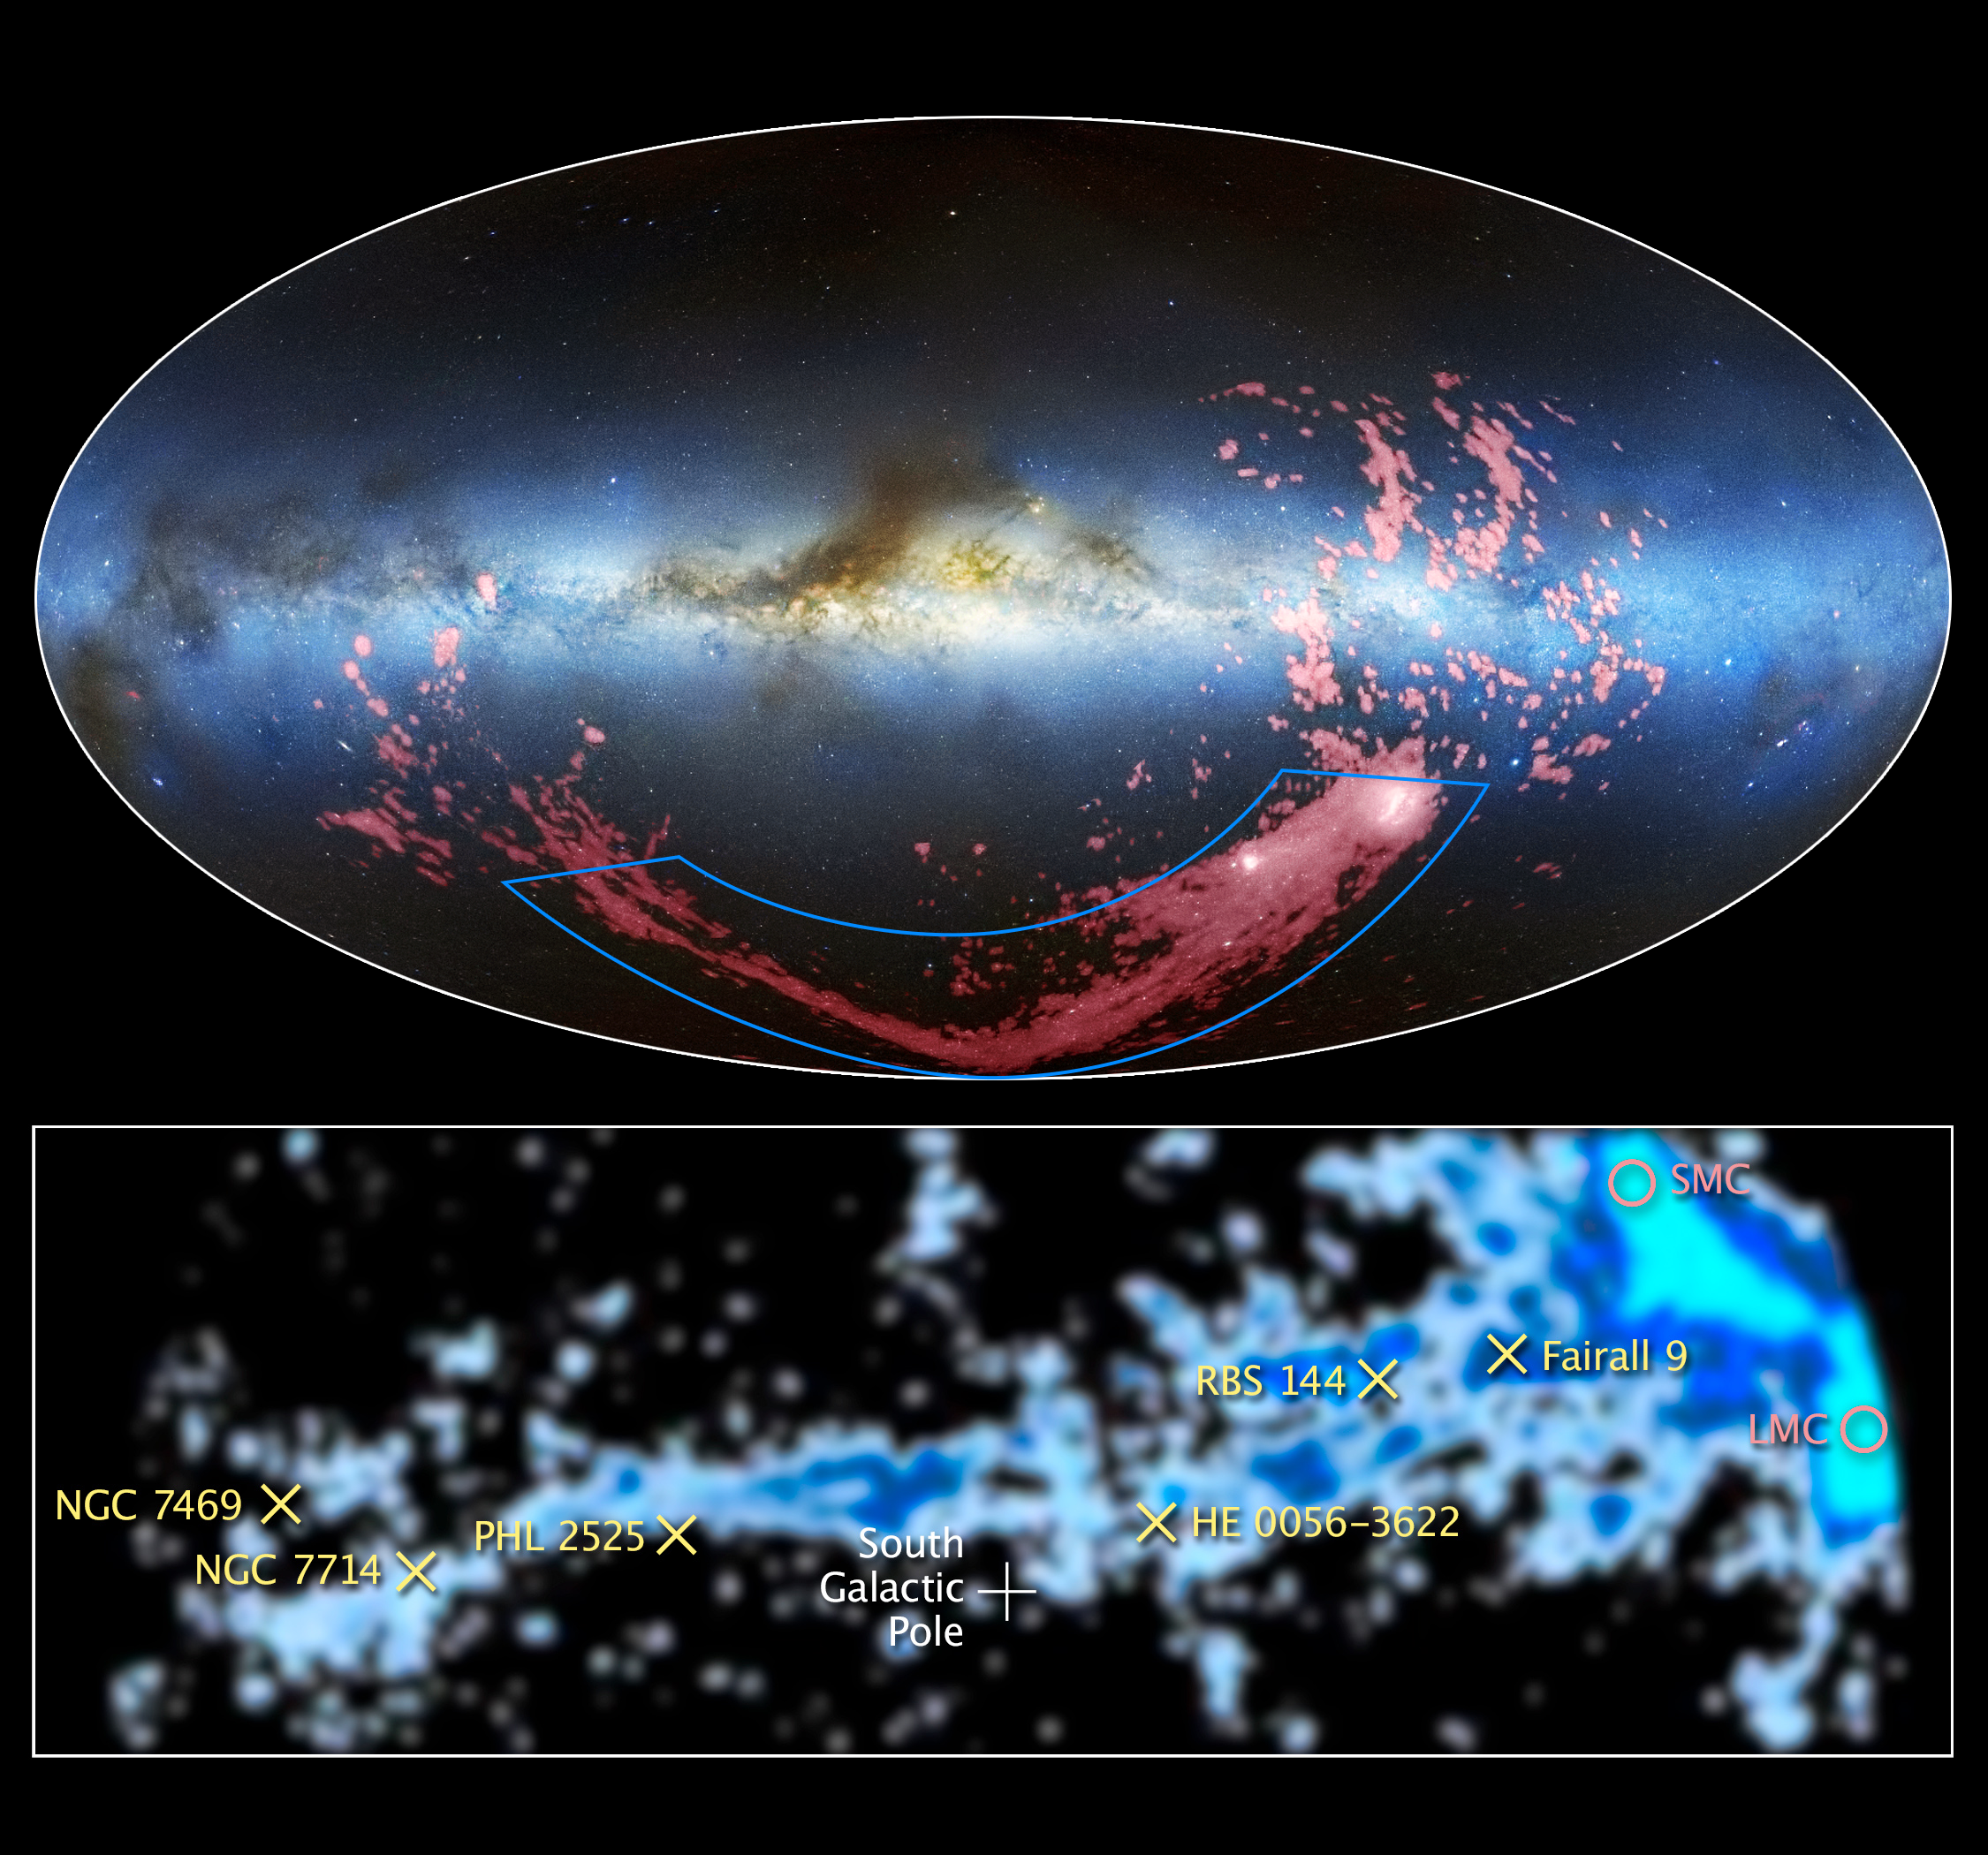

Tracing the origin of the Magellanic Stream

These images show wide and close-up views of a long ribbon of gas called the Magellanic Stream, which stretches nearly halfway around the Milky Way.

In the combined radio and visible-light image at the top, the gaseous stream is shown in pink. The radio observations from the Leiden/Argentine/Bonn (LAB) Survey have been combined with the Mellinger All-Sky Panorama in visible light. The Milky Way is the light blue band in the centre of the image. The brown clumps are interstellar dust clouds in our galaxy. The Magellanic Clouds, satellite galaxies of the Milky Way, are the white regions at the bottom right.

The image at the bottom, taken at radio wavelengths, is a close-up map of the Magellanic Stream that also was generated from the LAB Survey. Researchers determined the chemistry of the gas filament by using Hubble's Cosmic Origins Spectrograph (COS) to measure the amount of heavy elements, such as oxygen and sulphur, at six locations (marked with an "x") along the Magellanic Stream. COS observed light from faraway quasars that passed through the stream, and detected the spectral fingerprints of these elements from the way they absorb ultraviolet light. Quasars are the brilliant cores of active galaxies.

These observations show that most of the gas was stripped from the Small Magellanic Cloud about two billion years ago — but surprisingly, a second region of the stream was formed more recently from the Large Magellanic Cloud. The pink circles to the right mark the location of the Small and Large Magellanic Clouds.

Credit for the radio/visible light image: David L. Nidever, et al., NRAO/AUI/NSF and Mellinger, LAB Survey, Parkes Observatory, Westerbork Observatory, and Arecibo Observatory.
Credit for the radio image: LAB Survey